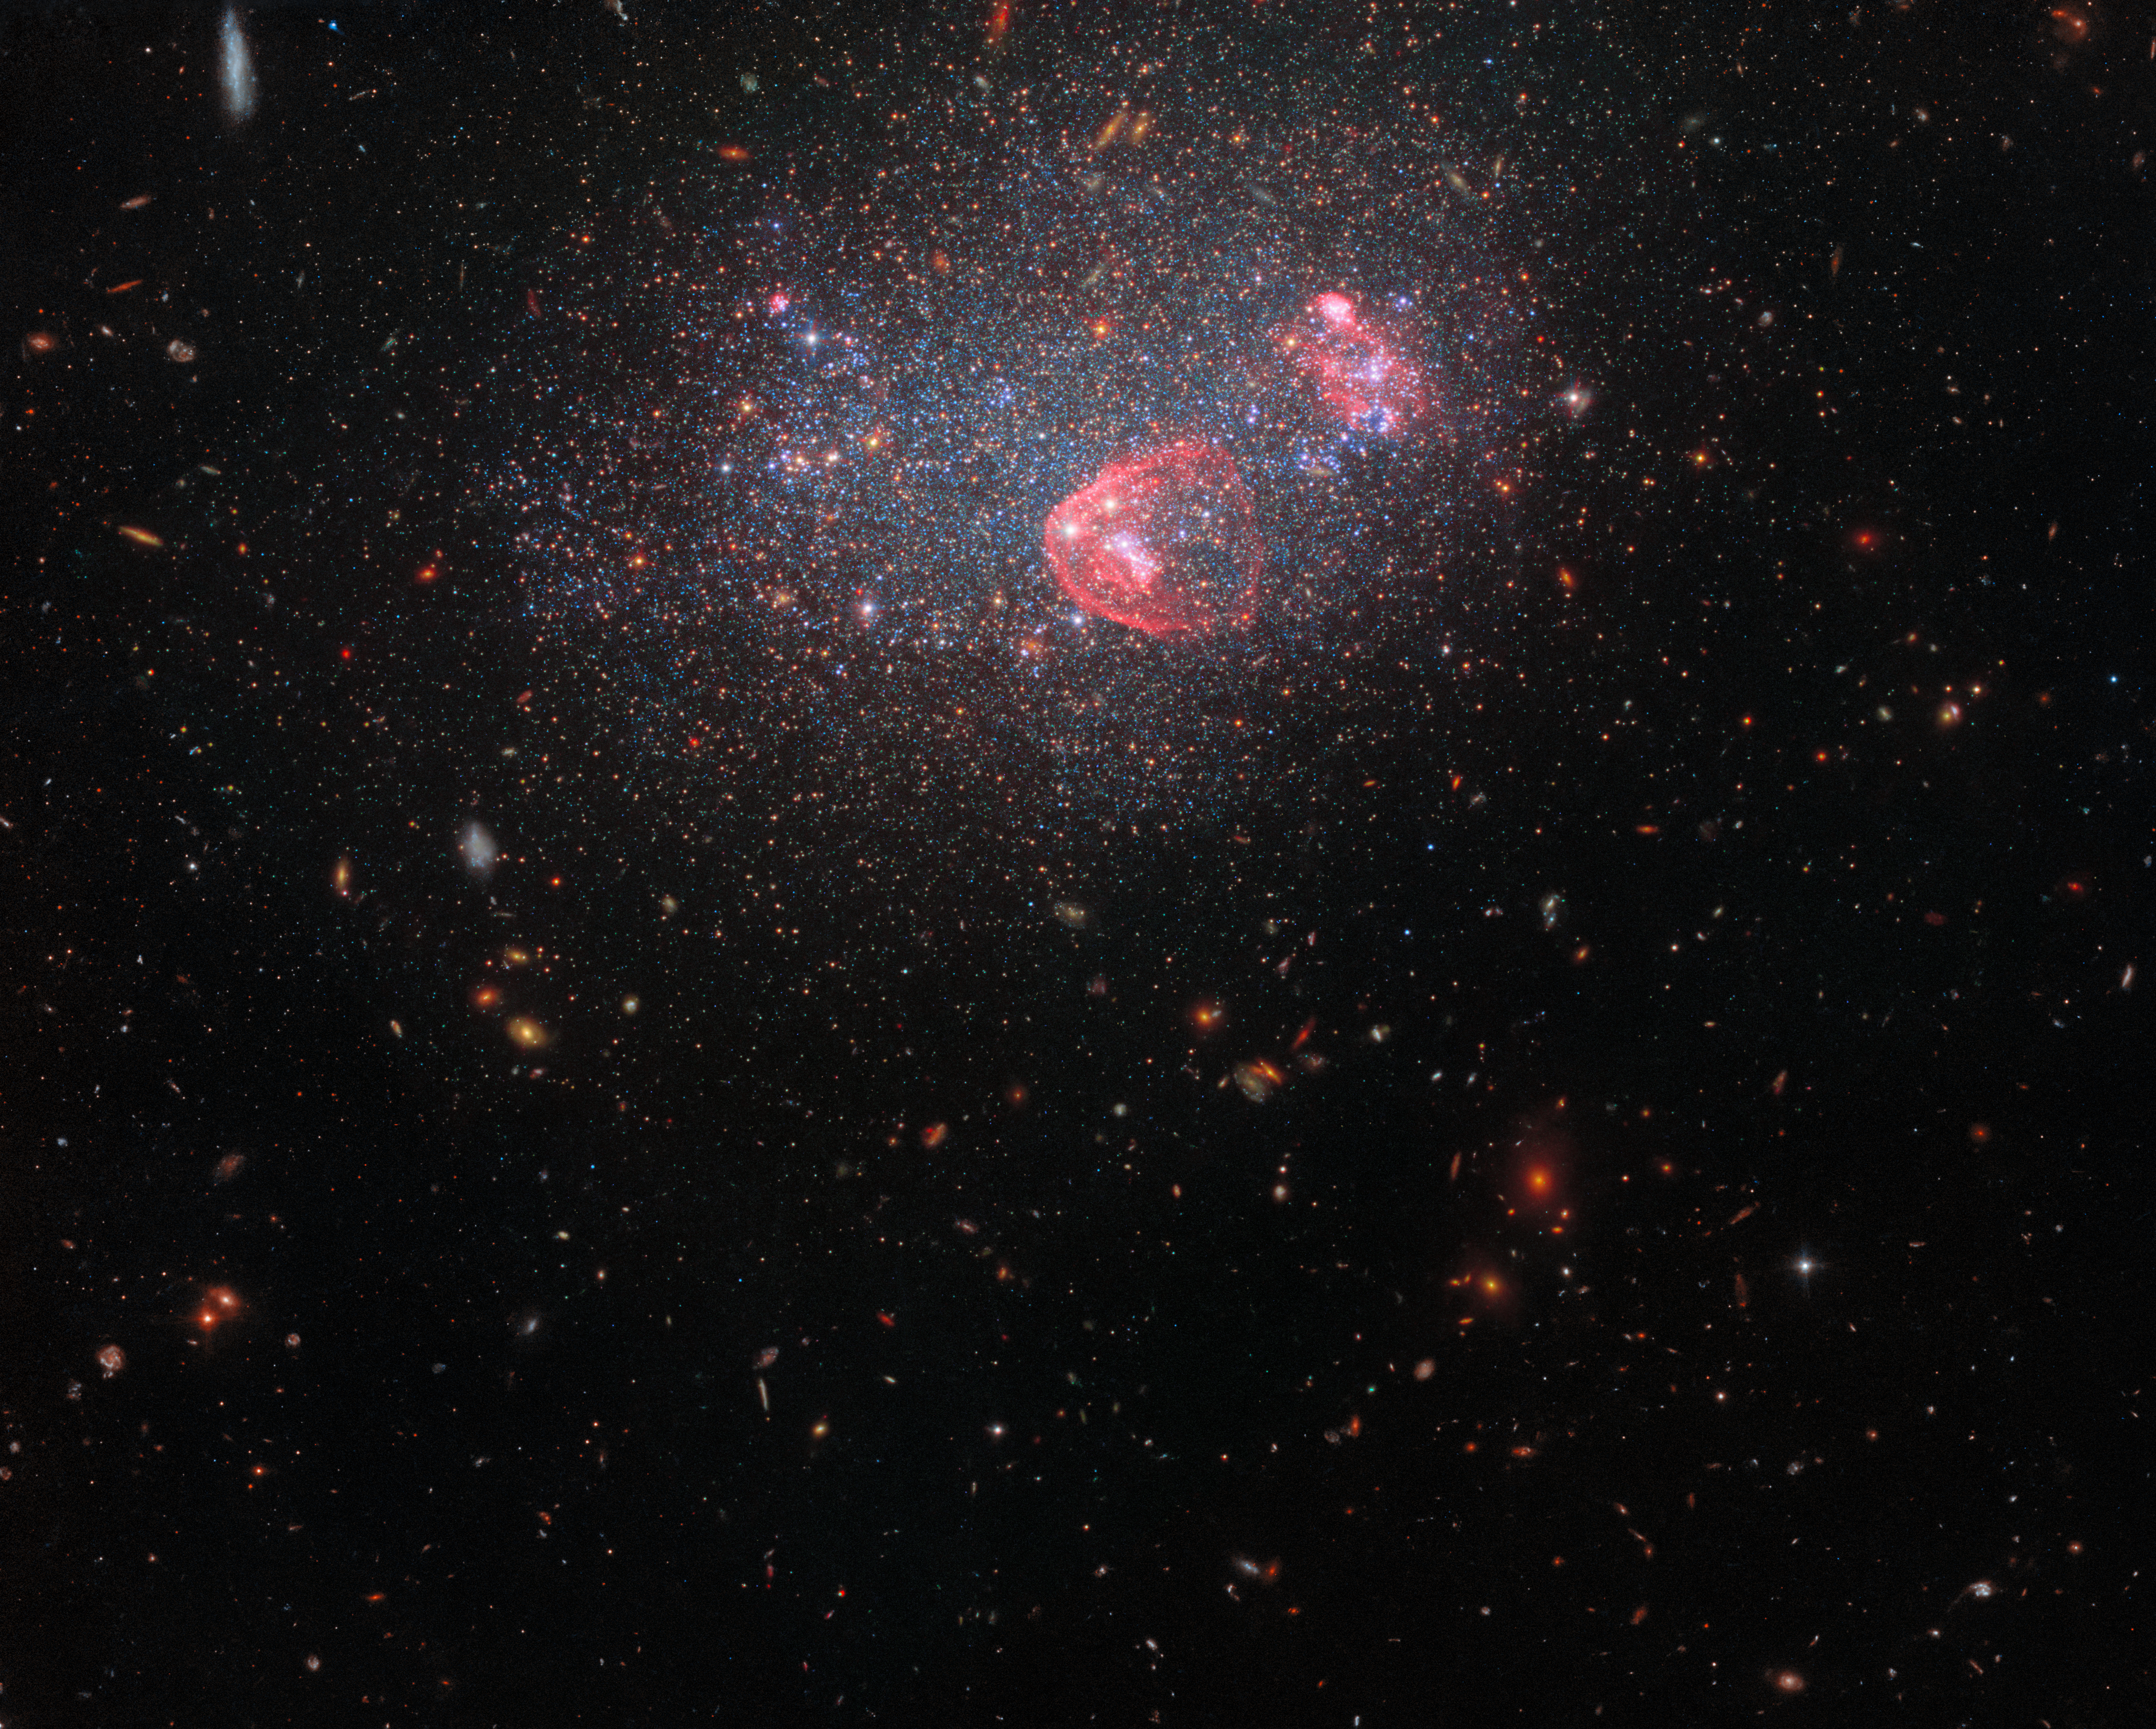

Dwarf irregular galaxy UGC 8091 (wide-field view)

For the end of the year and the holiday season Hubble has captured the festive bundle of lights known as UGC 8091. UGC 8091, also known as GR 8, lies around seven million light-years from Earth in the constellation Virgo. It is a dwarf irregular galaxy: a comparatively small, low-mass galaxy without a distinct or uniform shape.

The filters used in this image date from 2006 up to 2021, and were taken by two of Hubble’s most advanced instruments: the Wide Field Camera 3 and the Advanced Camera for Surveys. An astonishing twelve filters combine to produce this image, with light from the mid-ultraviolet right through to the red end of the visible spectrum contributing. The blossoming patches of red represent light emitted by excited hydrogen molecules in hot, energetic stars that have formed in recent starbursts. The other glittering lights on show are a mix of older stars.

Credit: ESA/Hubble, NASA Y. Choi (NOIRLab), K. Gilbert (Space Telescope Science Institute), J. Dalcanton (Flatiron Institute and University of Washington